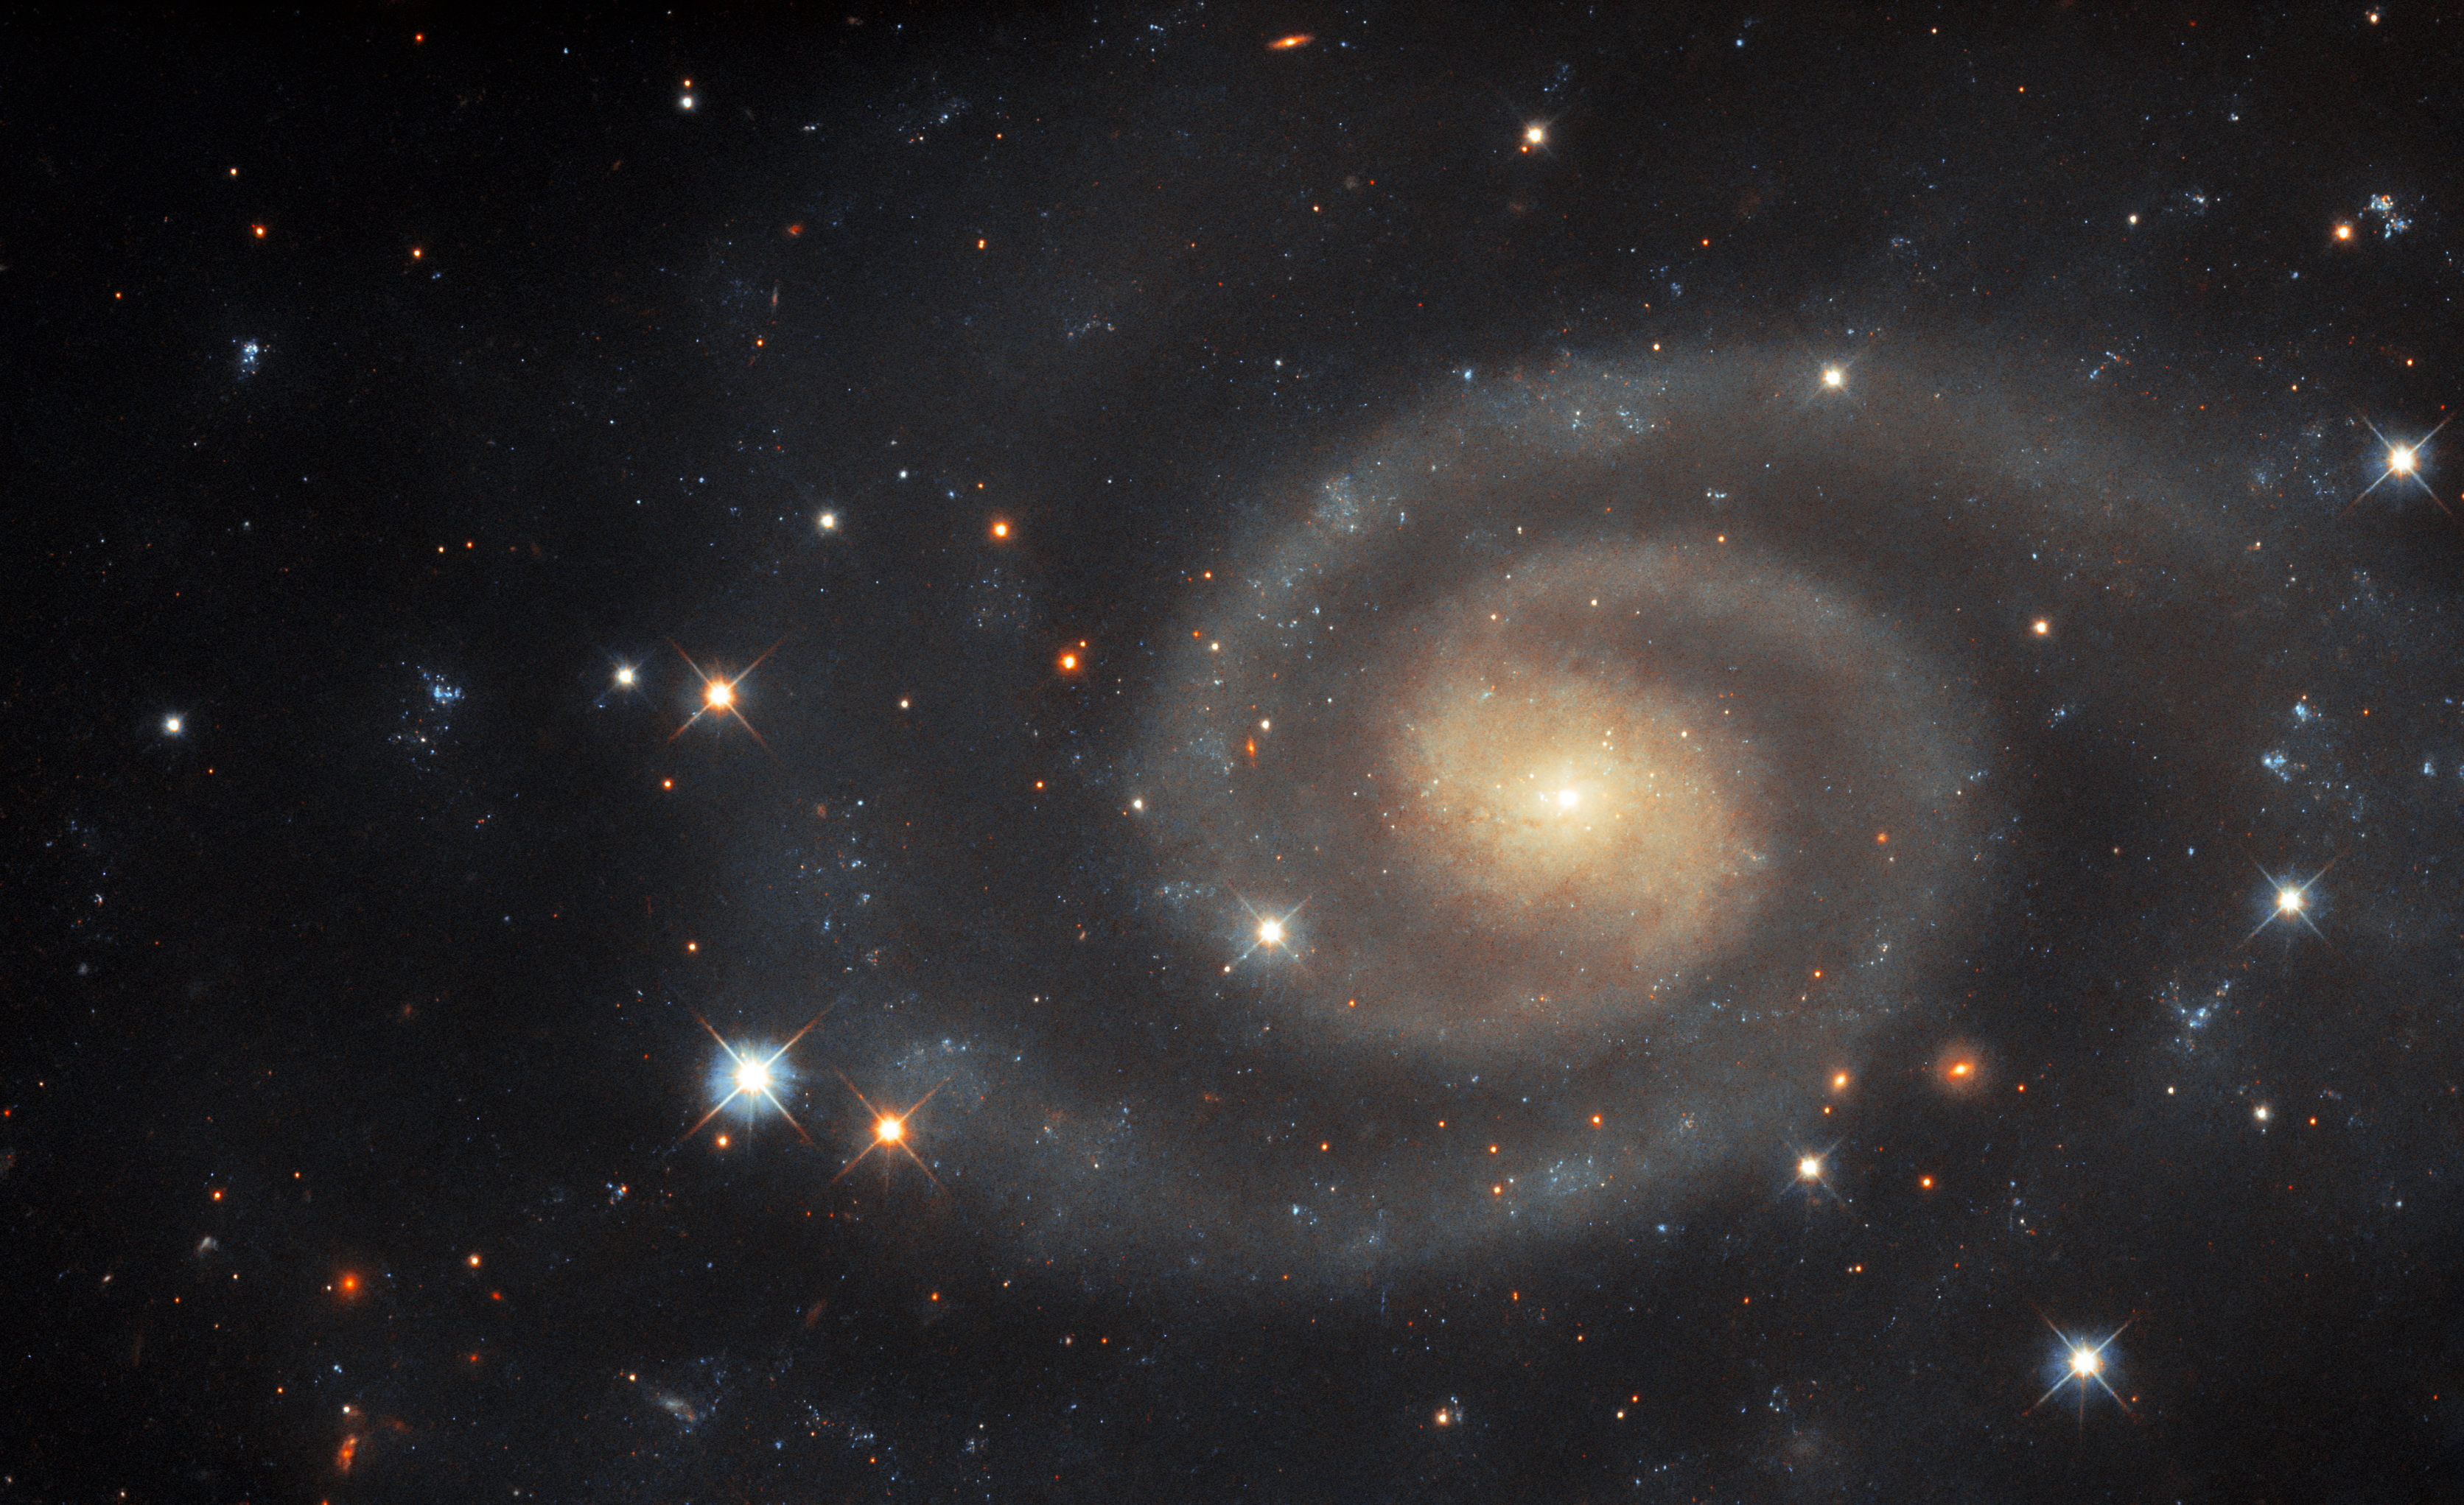

Dim, but still distinct

This image of the spiral galaxy UGC 11105 is not as bright and vivid as some other Hubble Pictures of the Week. This softly luminous galaxy — lying in the constellation Hercules, about 110 million light-years from Earth — seems outshone by the sparkling foreground stars that surround it. The type II supernova which took place in this galaxy in 2019, while no longer visible in this image, definitely outshone the galaxy at the time! To be more precise, UGC 11105 has an apparent magnitude of around 13.6 in the optical light regime (this image was created using data that covers the heart of the optical regime, in addition to ultraviolet data). Astronomers have different ways of quantifying how bright celestial objects are, and apparent magnitude is one of them.

Firstly, the ‘apparent’ part of this quantity refers to the fact that apparent magnitude only describes how bright objects appear to be from Earth, which is not the same thing as measuring how bright they actually are. For example, in reality the variable star Betelgeuse is about 21 000 times brighter than our Sun, but because the Sun is much, much closer to Earth, Betelgeuse appears to be vastly less bright than it. The ‘magnitude’ part is a little harder to describe, because the magnitude scale does not have a unit associated with it, unlike, for example, mass, which we measure in kilograms, or length, which we measure in metres. Magnitude values only have meaning relative to other magnitude values. Furthermore, the scale is not linear, but is a type of mathematical scale known as ‘reverse logarithmic’, which also means that lower-magnitude objects are brighter than higher-magnitude objects.

As an example, UGC 11105 has an apparent magnitude of around 13.6 in the optical, whereas the Sun has an apparent magnitude of about -26.8. Accounting for the reverse logarithmic scale, this means that the Sun appears to be about 14 thousand trillion times brighter than UGC 11105 from our perspective here on Earth, even though UGC 11105 is an entire galaxy! The faintest stars that humans can see with the naked eye come in at about sixth magnitude, with most galaxies being much dimmer than this. Hubble, however, has been known to detect objects with apparent magnitudes up to the extraordinary value of 31, so UGC 11105 does not really present much of a challenge.

Credit: ESA/Hubble & NASA, R. J. Foley (UC Santa Cruz)